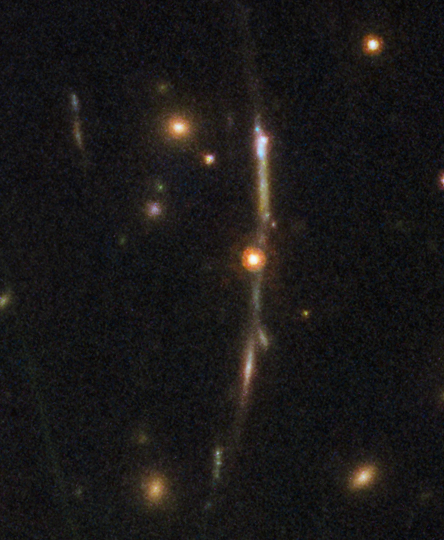

Sunburst Arc 3

This image, taken with the NASA/ESA Hubble Space Telescope, shows one of four arcs formed of the light from the galaxy nicknamed the Sunburst Arc. Created by strong gravitational lensing, this bright arc of light shows at least one copy of the image of the galaxy — several more copies are visible in the other three arcs.

Credit: ESA/Hubble, NASA, Rivera-Thorsen et al.